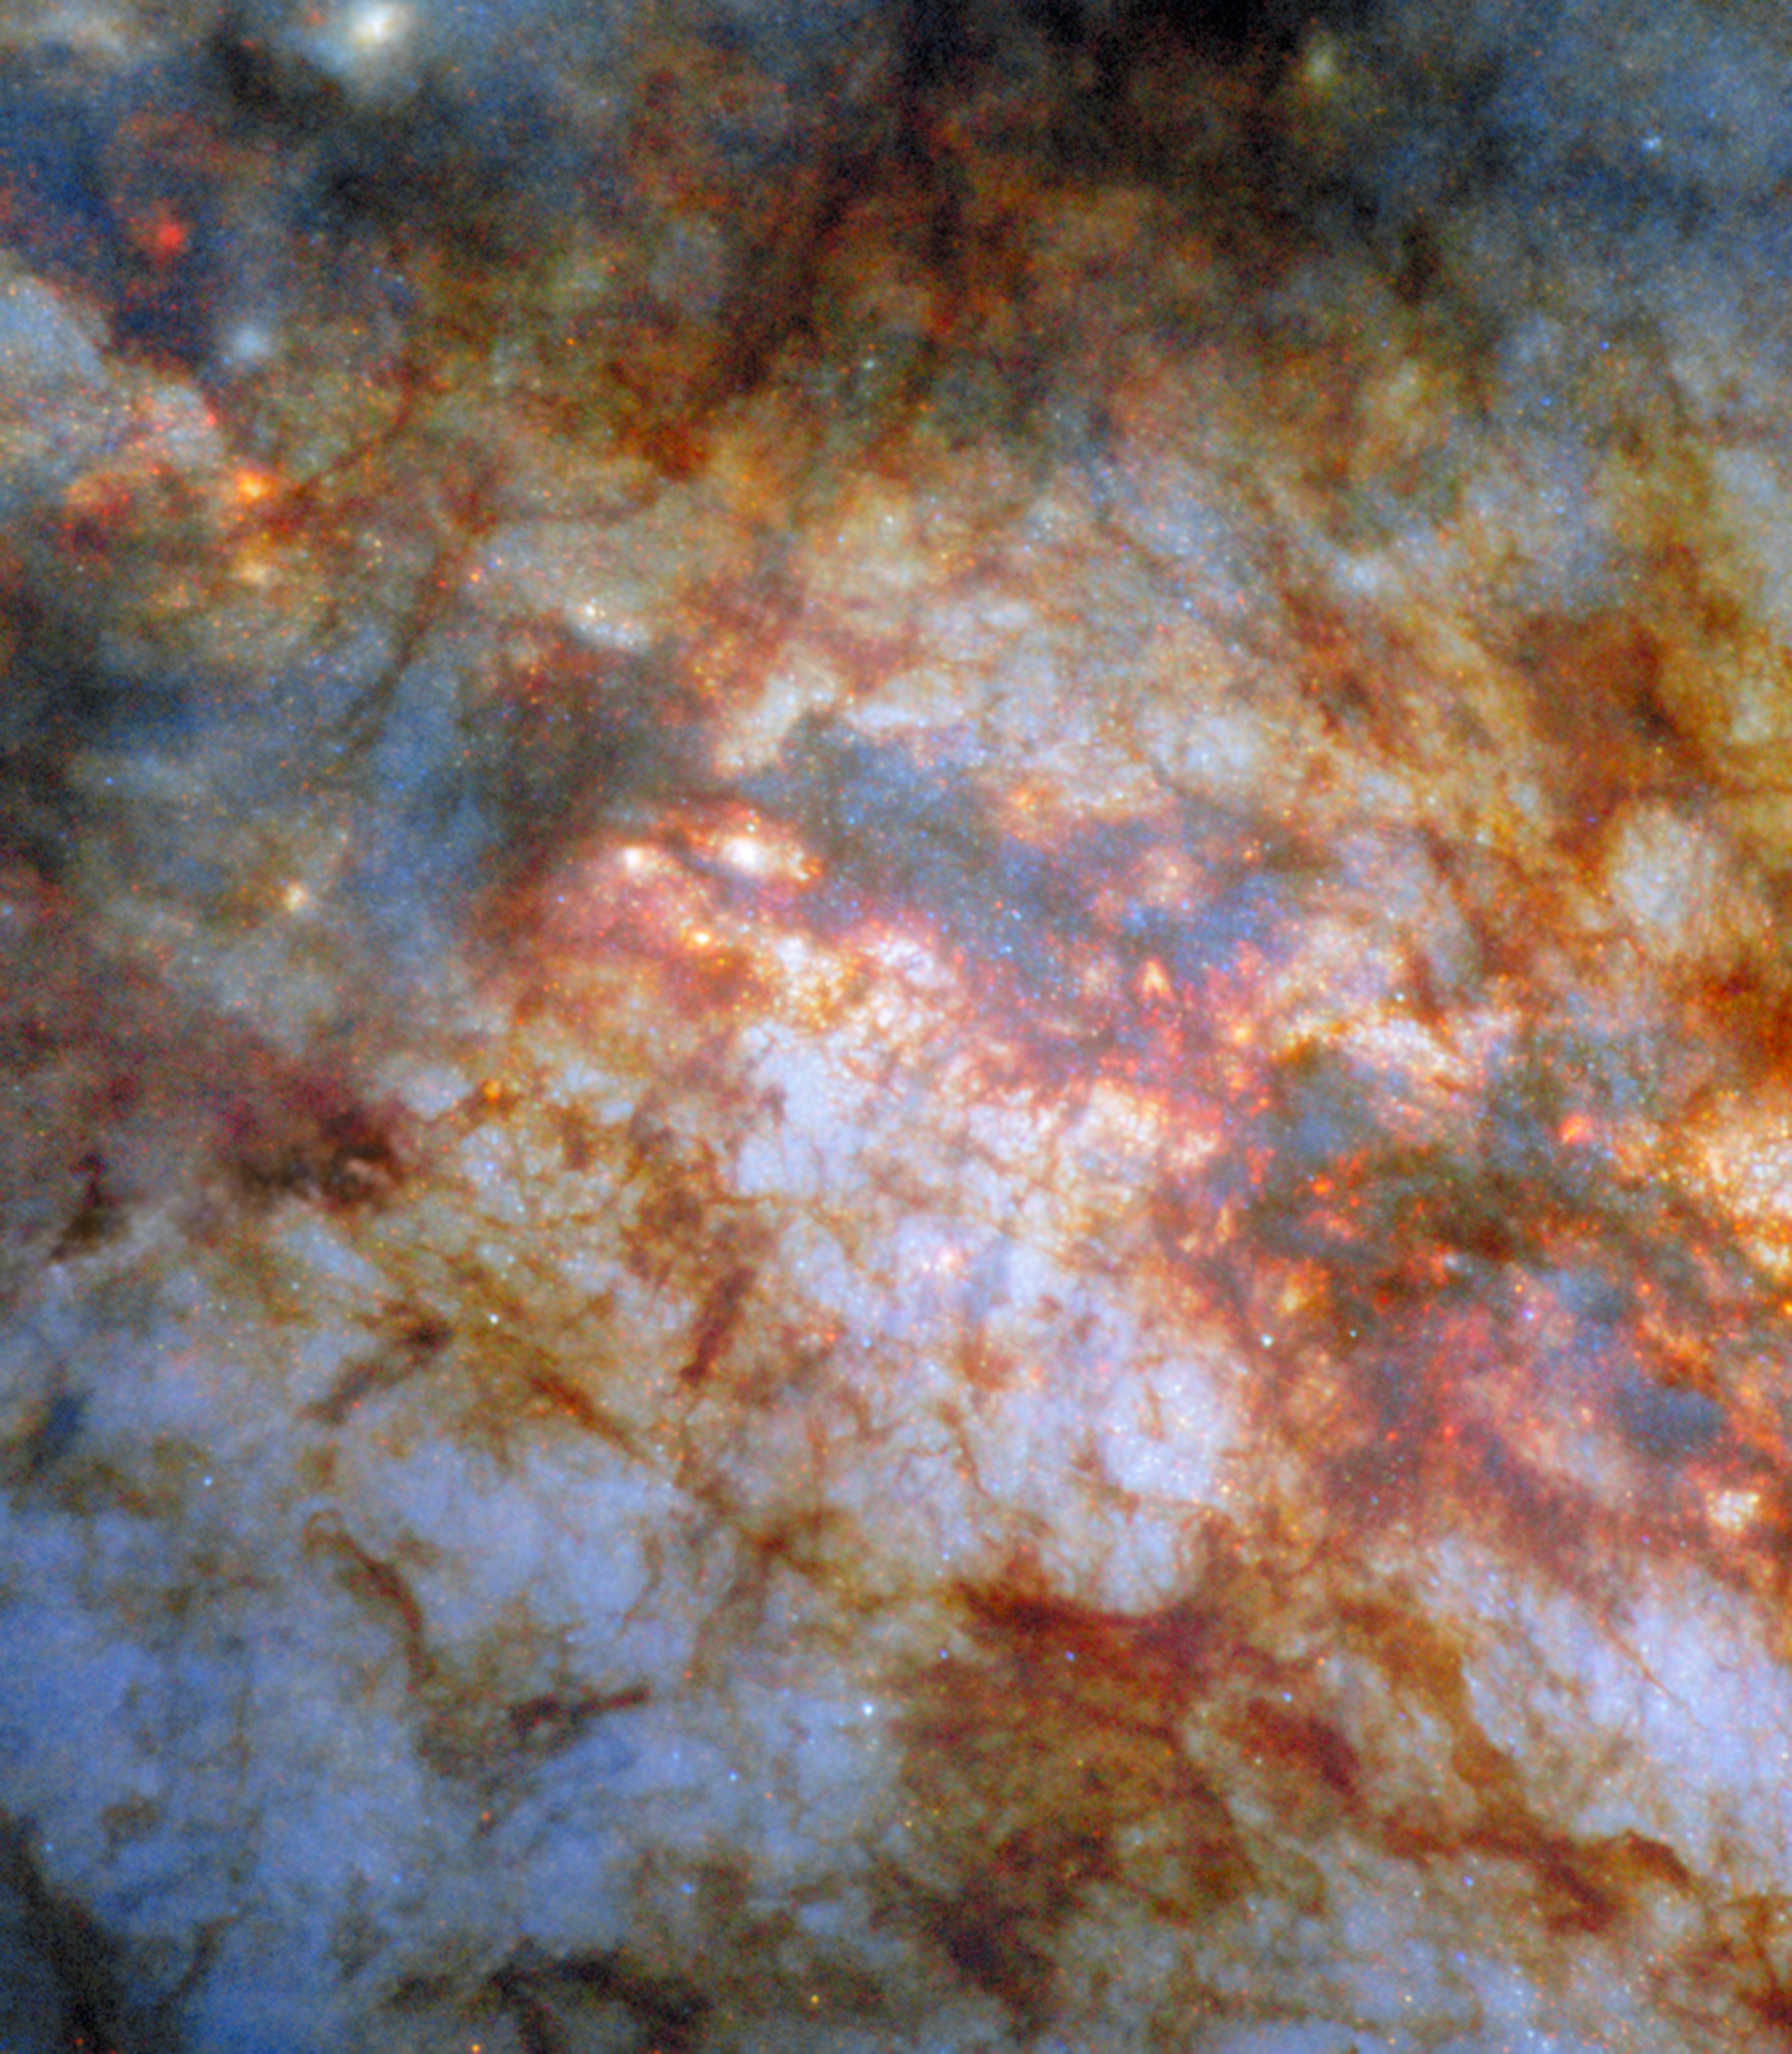

The smouldering heart of a celestial cigar

What lurks behind the dense, dusty clouds of this galactic neighbour? There lies the star-powered heart of the galaxy Messier 82 (M82), also known as the Cigar Galaxy. Located just 12 million light-years away in the constellation Ursa Major (The Great Bear), the Cigar Galaxy is considered a nearby galaxy. As this NASA/ESA Hubble Space Telescope Picture of the Week shows in great detail, it’s home to brilliant stars whose light is shaded by sculptural clouds, clumps and streaks of dust and gas.

It’s no surprise that the Cigar Galaxy is so packed with stars, obscured though they might be by the distinctive clouds pictured here. Forming stars 10 times faster than the Milky Way, the Cigar Galaxy is what astronomers call a starburst galaxy. The intense starburst period that grips this galaxy has given rise to super star clusters in the galaxy’s heart. Each of these super star clusters contains hundreds of thousands of stars and is more luminous than a typical star cluster. Researchers used Hubble to home in on these massive clusters and reveal how they form and evolve.

Hubble’s views of the Cigar Galaxy have been featured before, both as a previous Picture of the Week in 2012 and as an image released in celebration of Hubble’s 16th birthday. The NASA/ESA/CSA James Webb Space Telescope has also turned toward the Cigar Galaxy, producing infrared images in 2024 and earlier this year.

This image features something not seen in previously released Hubble images of the galaxy: data from the High Resolution Channel of the Advanced Camera for Surveys (ACS). The High Resolution Channel is one of three sub-instruments of ACS, which was installed in 2002. In five years of operation, the High Resolution Channel returned fantastically detailed observations of crowded, starry environments like the centres of starburst galaxies. An electronics fault in 2007 unfortunately left the High Resolution Channel disabled.

Credit: ESA/Hubble & NASA, W. D. Vacca